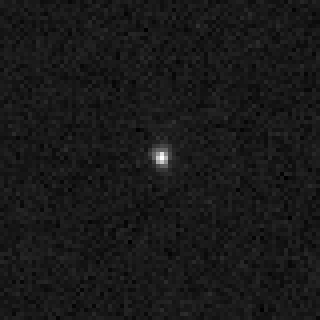

Sedna mystery deepens as Hubble offers best look at farthest planetoid

At a distance of over 8 billion miles (13 billion kilometres), Sedna is so far away it is reduced to one picture element (pixel) in this image taken in high-resolution mode with Hubble's Advanced Camera for Surveys. This image sets an upper limit on Sedna's size of 1,000 miles in diameter. Hubble may just barely be resolving the object. It is surprising that Hubble does not see a suspected moon near the planetoid. Either the moon's not there, or, far less likely, it is being eclipsed by Sedna, or it is transiting Sedna. The gravitational tug of a moon would best explain Sedna's extremely slow rotation of 40 days as inferred from ground-based photometric observations.

Credit: NASA, ESA and M. Brown (Caltech)